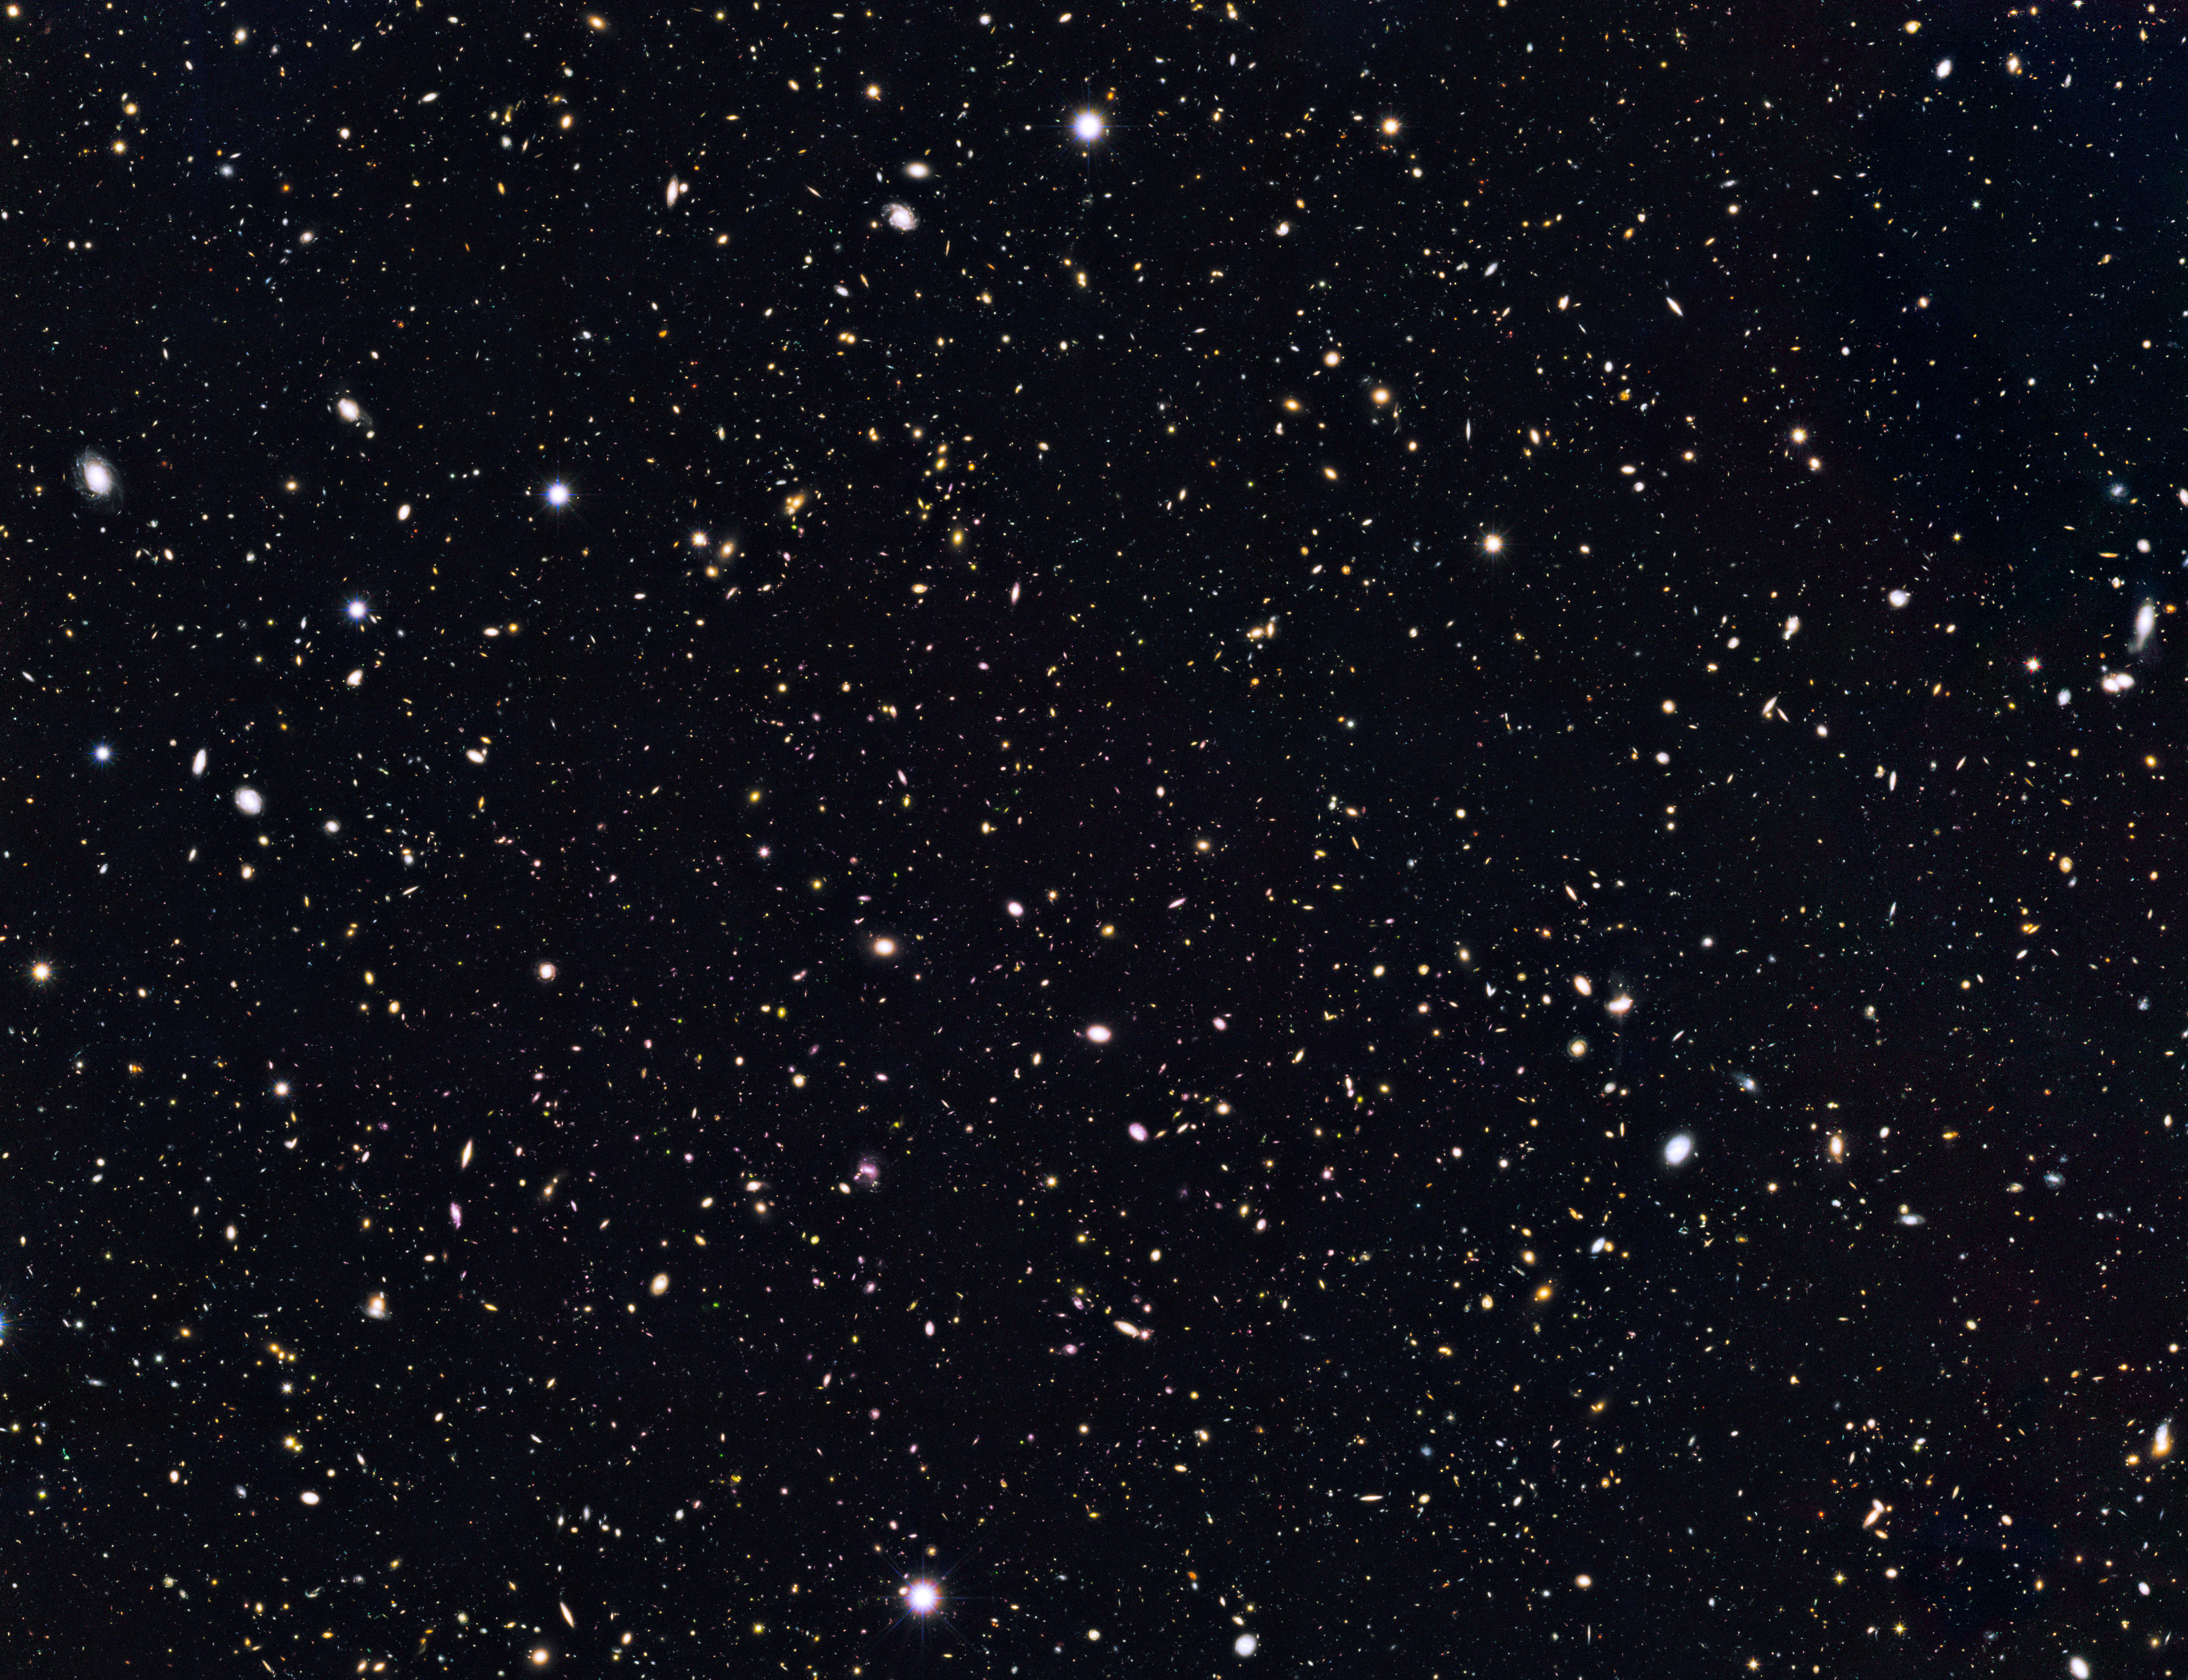

The Hubble GOODS North field (GOODS-N)

This image is from a deep sky Hubble Space Telescope survey called GOODS North (Great Observatories Origins Deep Survey).

Credit: NASA, ESA, G. Illingworth (University of California, Santa Cruz), P. Oesch (University of California, Santa Cruz; Yale University), R. Bouwens and I. Labbé (Leiden University), and the Science Team